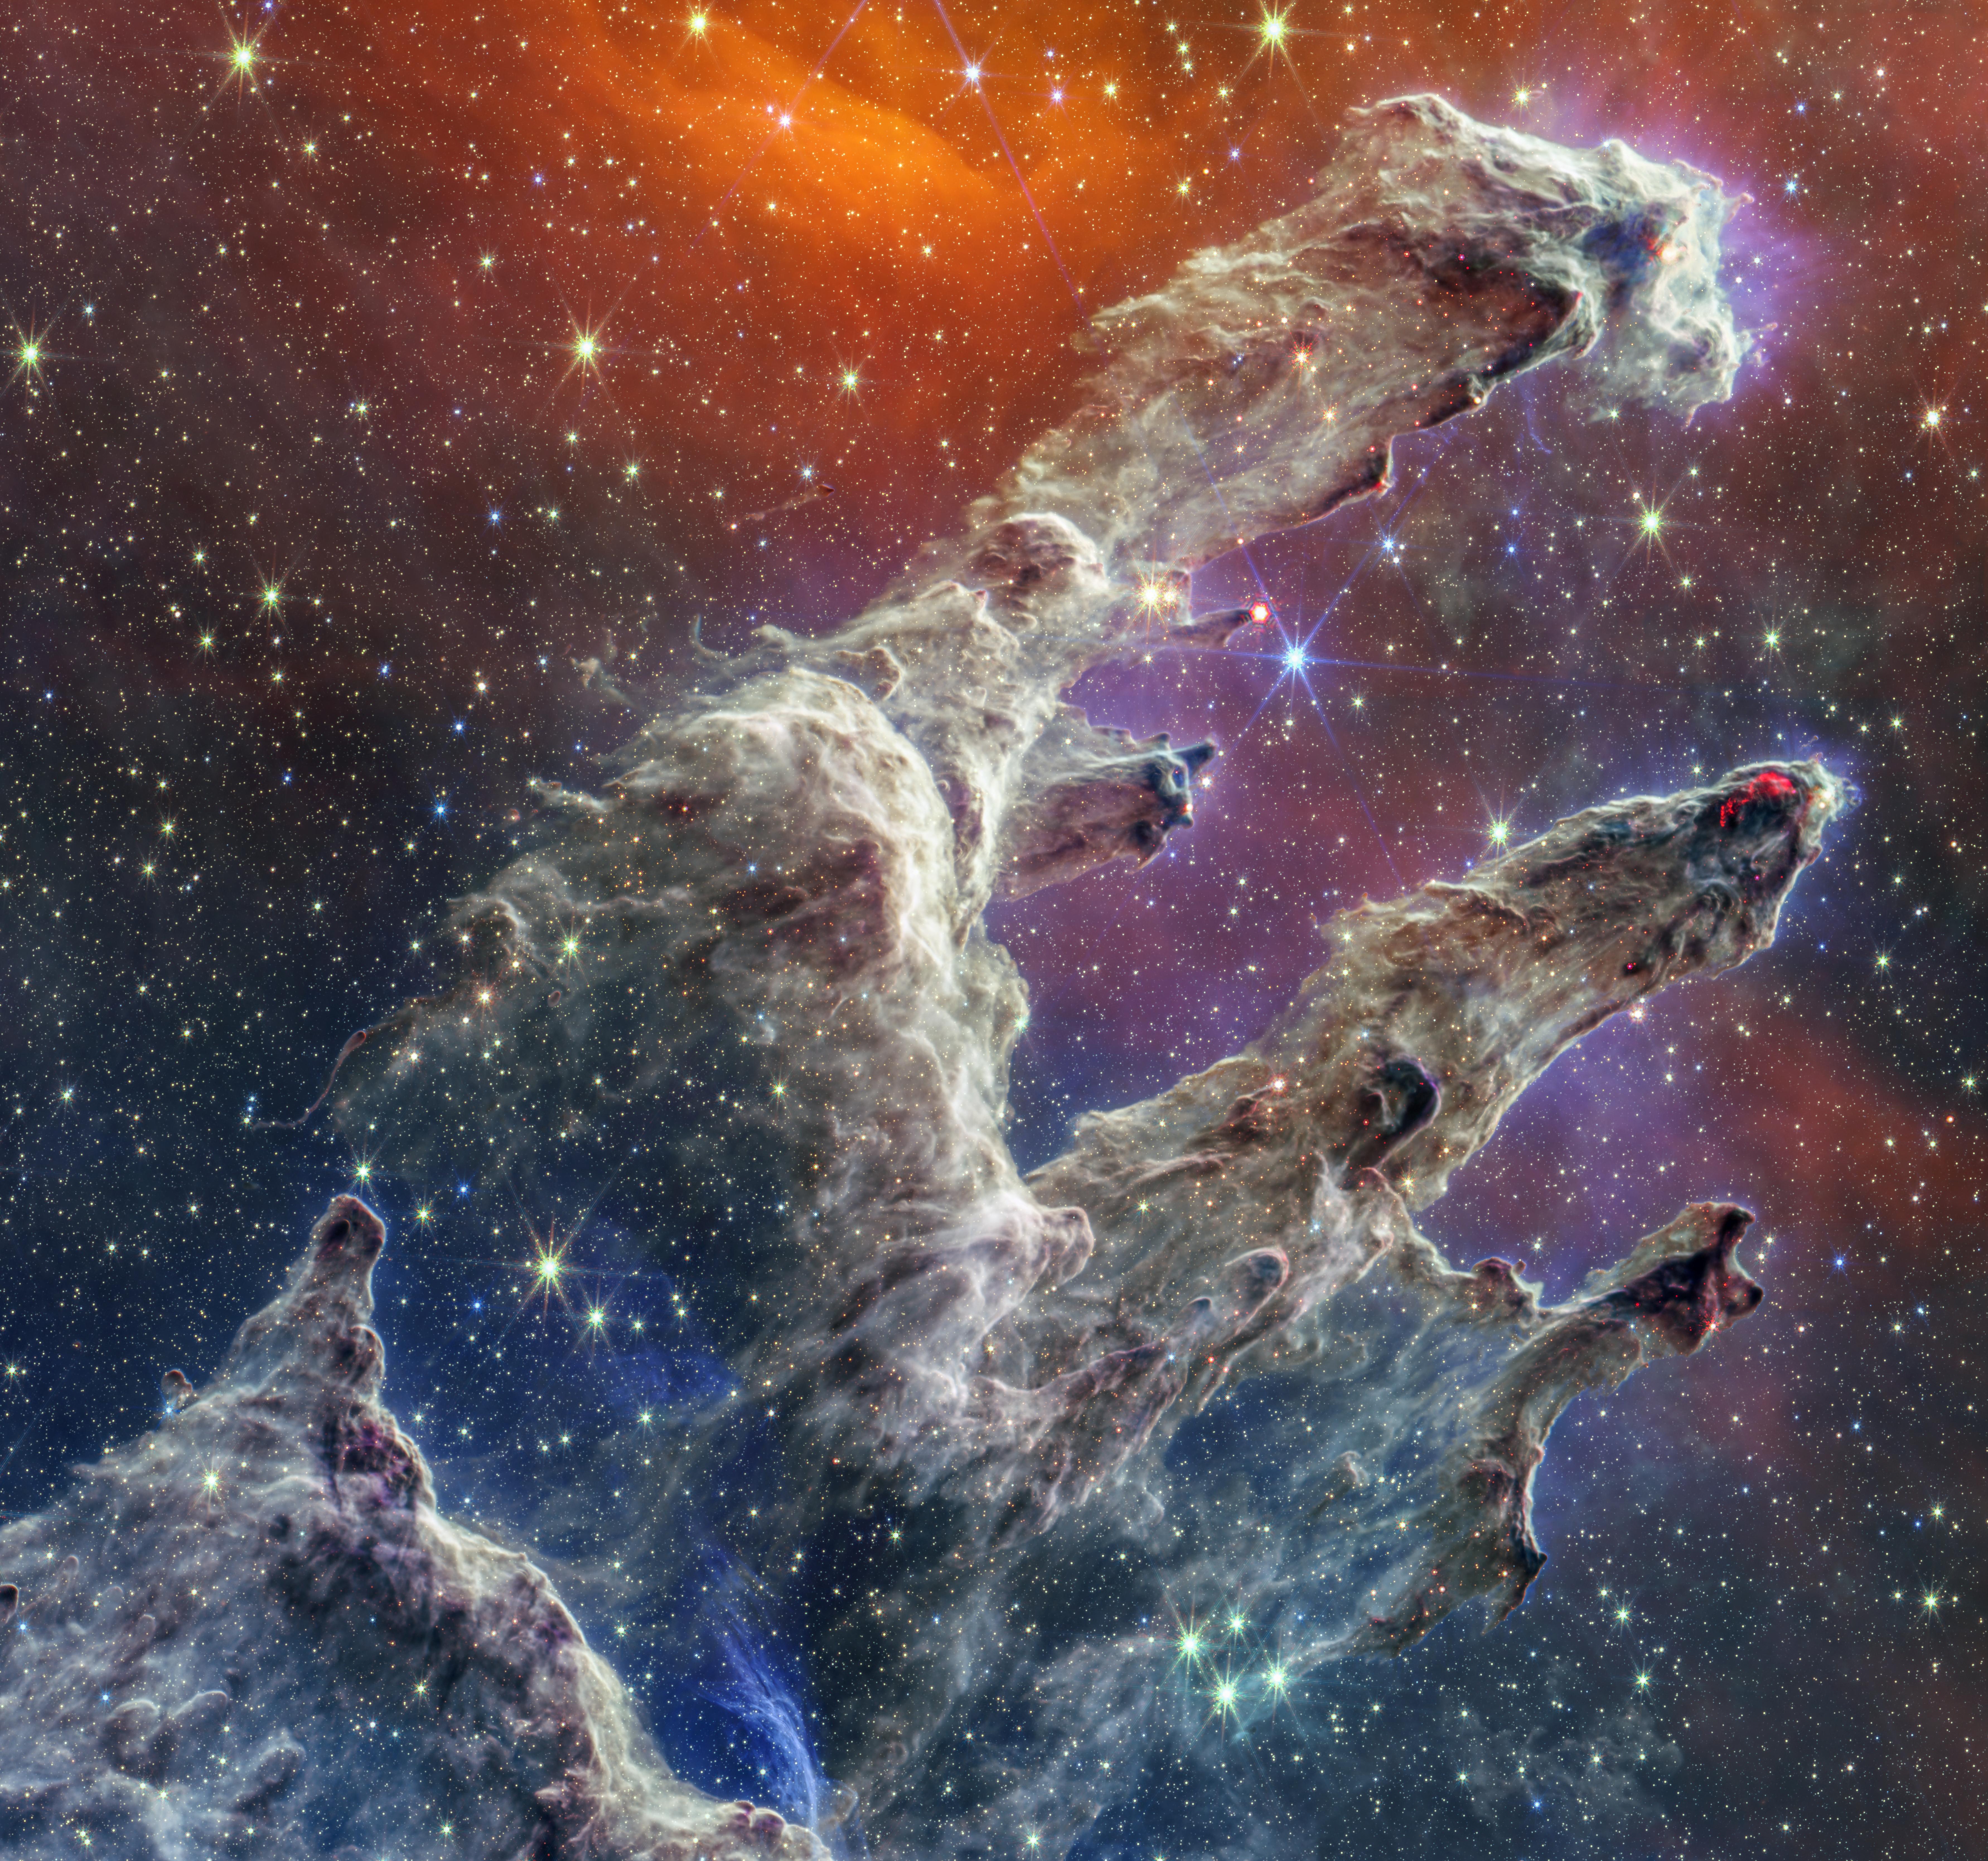

Pillars of Creation (NIRCam and MIRI Composite Image)

By combining images of the iconic Pillars of Creation from two cameras aboard the NASA/ESA/CSA James Webb Space Telescope, the Universe has been framed in its infrared glory. Webb’s near-infrared image was fused with its mid-infrared image, setting this star-forming region ablaze with new details.

Myriad stars are spread throughout the scene. The stars primarily show up in near-infrared light, marking a contribution of Webb’s Near-Infrared Camera (NIRCam). Near-infrared light also reveals thousands of newly formed stars – look for bright orange spheres that lie just outside the dusty pillars.

In mid-infrared light, the dust is on full display. The contributions from Webb’s Mid-Infrared Instrument (MIRI) are most apparent in the layers of diffuse, orange dust that drape the top of the image, relaxing into a V. The densest regions of dust are cast in deep indigo hues, obscuring our view of the activities inside the dense pillars.

Dust also makes up the spire-like pillars that extend from the bottom left to the top right. This is one of the reasons why the region is overflowing with stars – dust is a major ingredient of star formation. When knots of gas and dust with sufficient mass form in the pillars, they begin to collapse under their own gravitational attraction, slowly heat up, and eventually form new stars. Newly formed stars are especially apparent at the edges of the top two pillars – they are practically bursting onto the scene.

At the top edge of the second pillar, undulating detail in red hints at even more embedded stars. These are even younger, and are quite active as they form. The lava-like regions capture their periodic ejections. As stars form, they periodically send out supersonic jets that can interact within clouds of material, like these thick pillars of gas and dust. These young stars are estimated to be only a few hundred thousand years old, and will continue to form for millions of years.

Almost everything you see in this scene is local. The distant universe is largely blocked from our view both by the interstellar medium, which is made up of sparse gas and dust located between the stars, and a thick dust lane in our Milky Way galaxy. As a result, the stars take center stage in Webb’s view of the Pillars of Creation.

The Pillars of Creation is a small region within the vast Eagle Nebula, which lies 6,500 light-years away.

Revisit Webb’s near-infrared image and its its mid-infrared image. The Pillars of Creation was made famous by the NASA/ESA Hubble Space Telescope in 1995, and again in 2014.

MIRI was contributed by ESA and NASA, with the instrument designed and built by a consortium of nationally funded European Institutes (The MIRI European Consortium) in partnership with JPL and the University of Arizona.

Webb’s NIRCam was built by a team at the University of Arizona and Lockheed Martin’s Advanced Technology Center.

Credit: NASA, ESA, CSA, STScI, J. DePasquale (STScI), A. Pagan (STScI), A. M. Koekemoer (STScI)